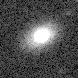

Galaxies: snapshots in time

Single images from the Galaxies: Snapshots in Time collage.

Credit: NASA & ESA